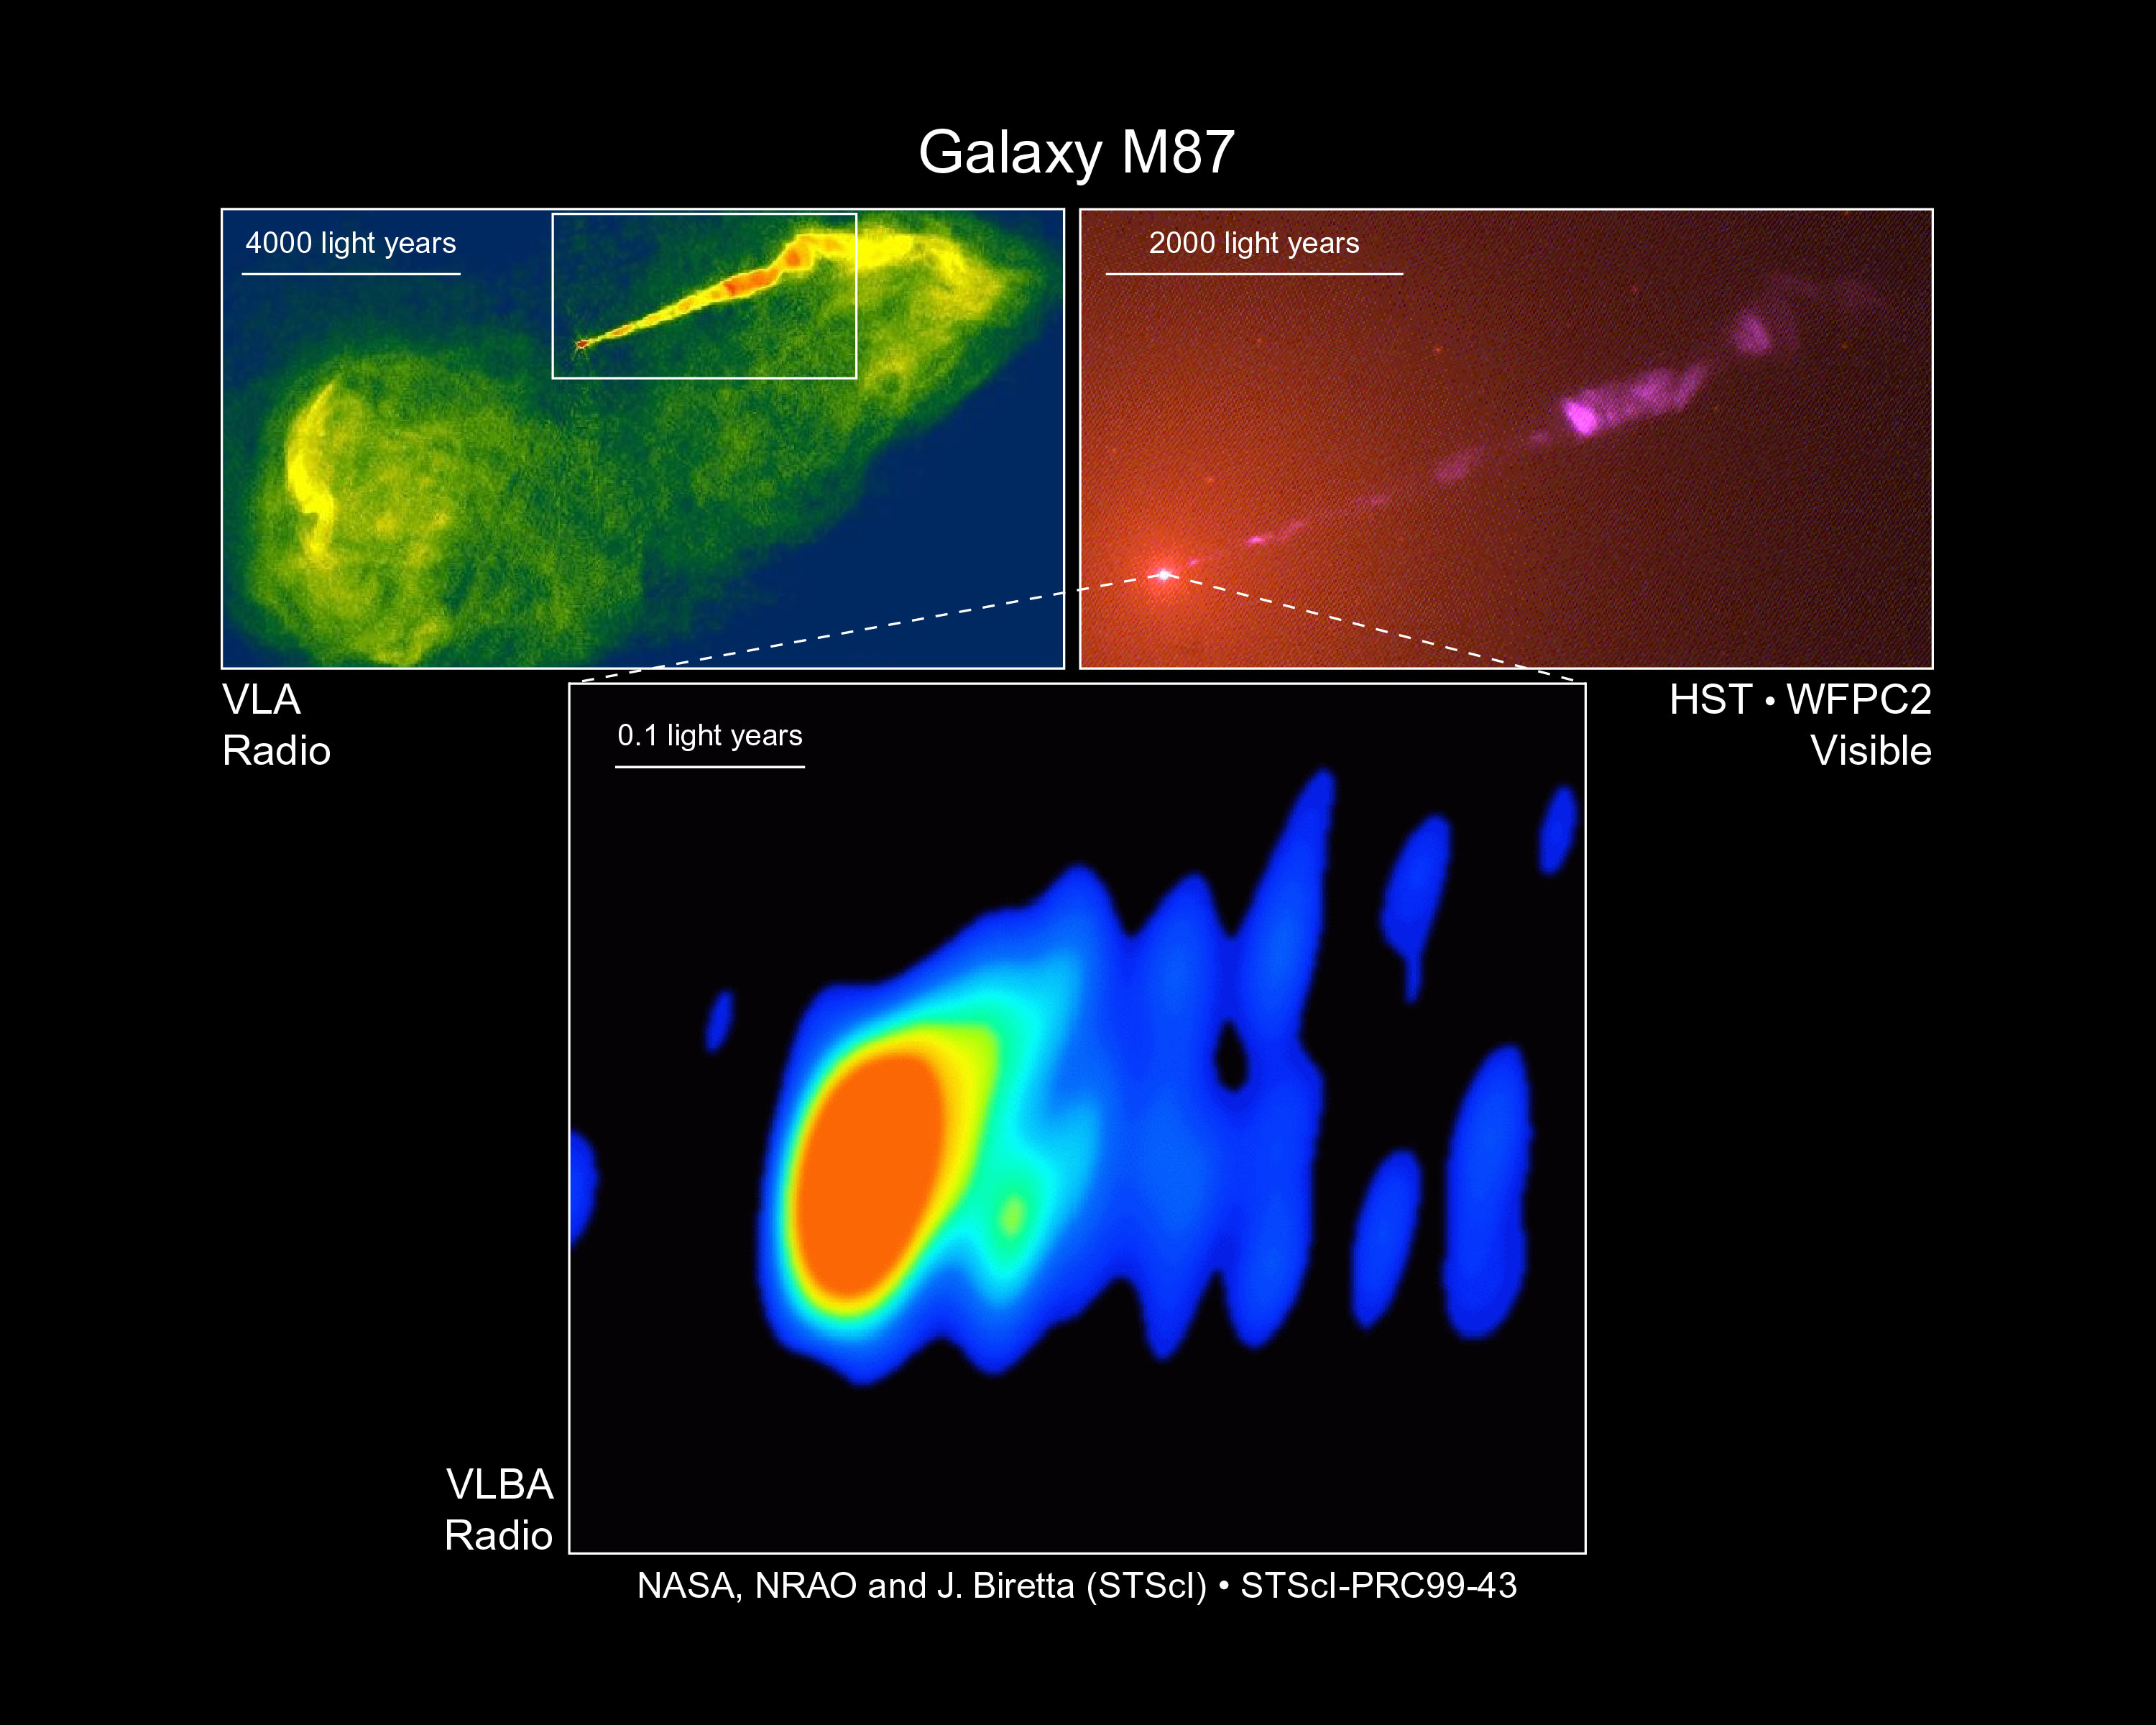

Close-up look at a jet near a black hole in galaxy M87 (ground-based view)

Space Telescope Science Institute astronomers and their co-investigators have gained their first glimpse of the mysterious region near a black hole at the heart of a distant galaxy, where a powerful stream of subatomic particles spewing outward at nearly the speed of light is formed into a beam, or jet, that then goes nearly straight for thousands of light-years. The astronomers used radio telescopes in Europe and the U.S., including the National Science Foundation's (NSF) Very Long Baseline Array (VLBA) to make the most detailed images ever of the center of the galaxy M 87, some 50 million light-years away.

Credit: National Radio Astronomy Observatory, STScI